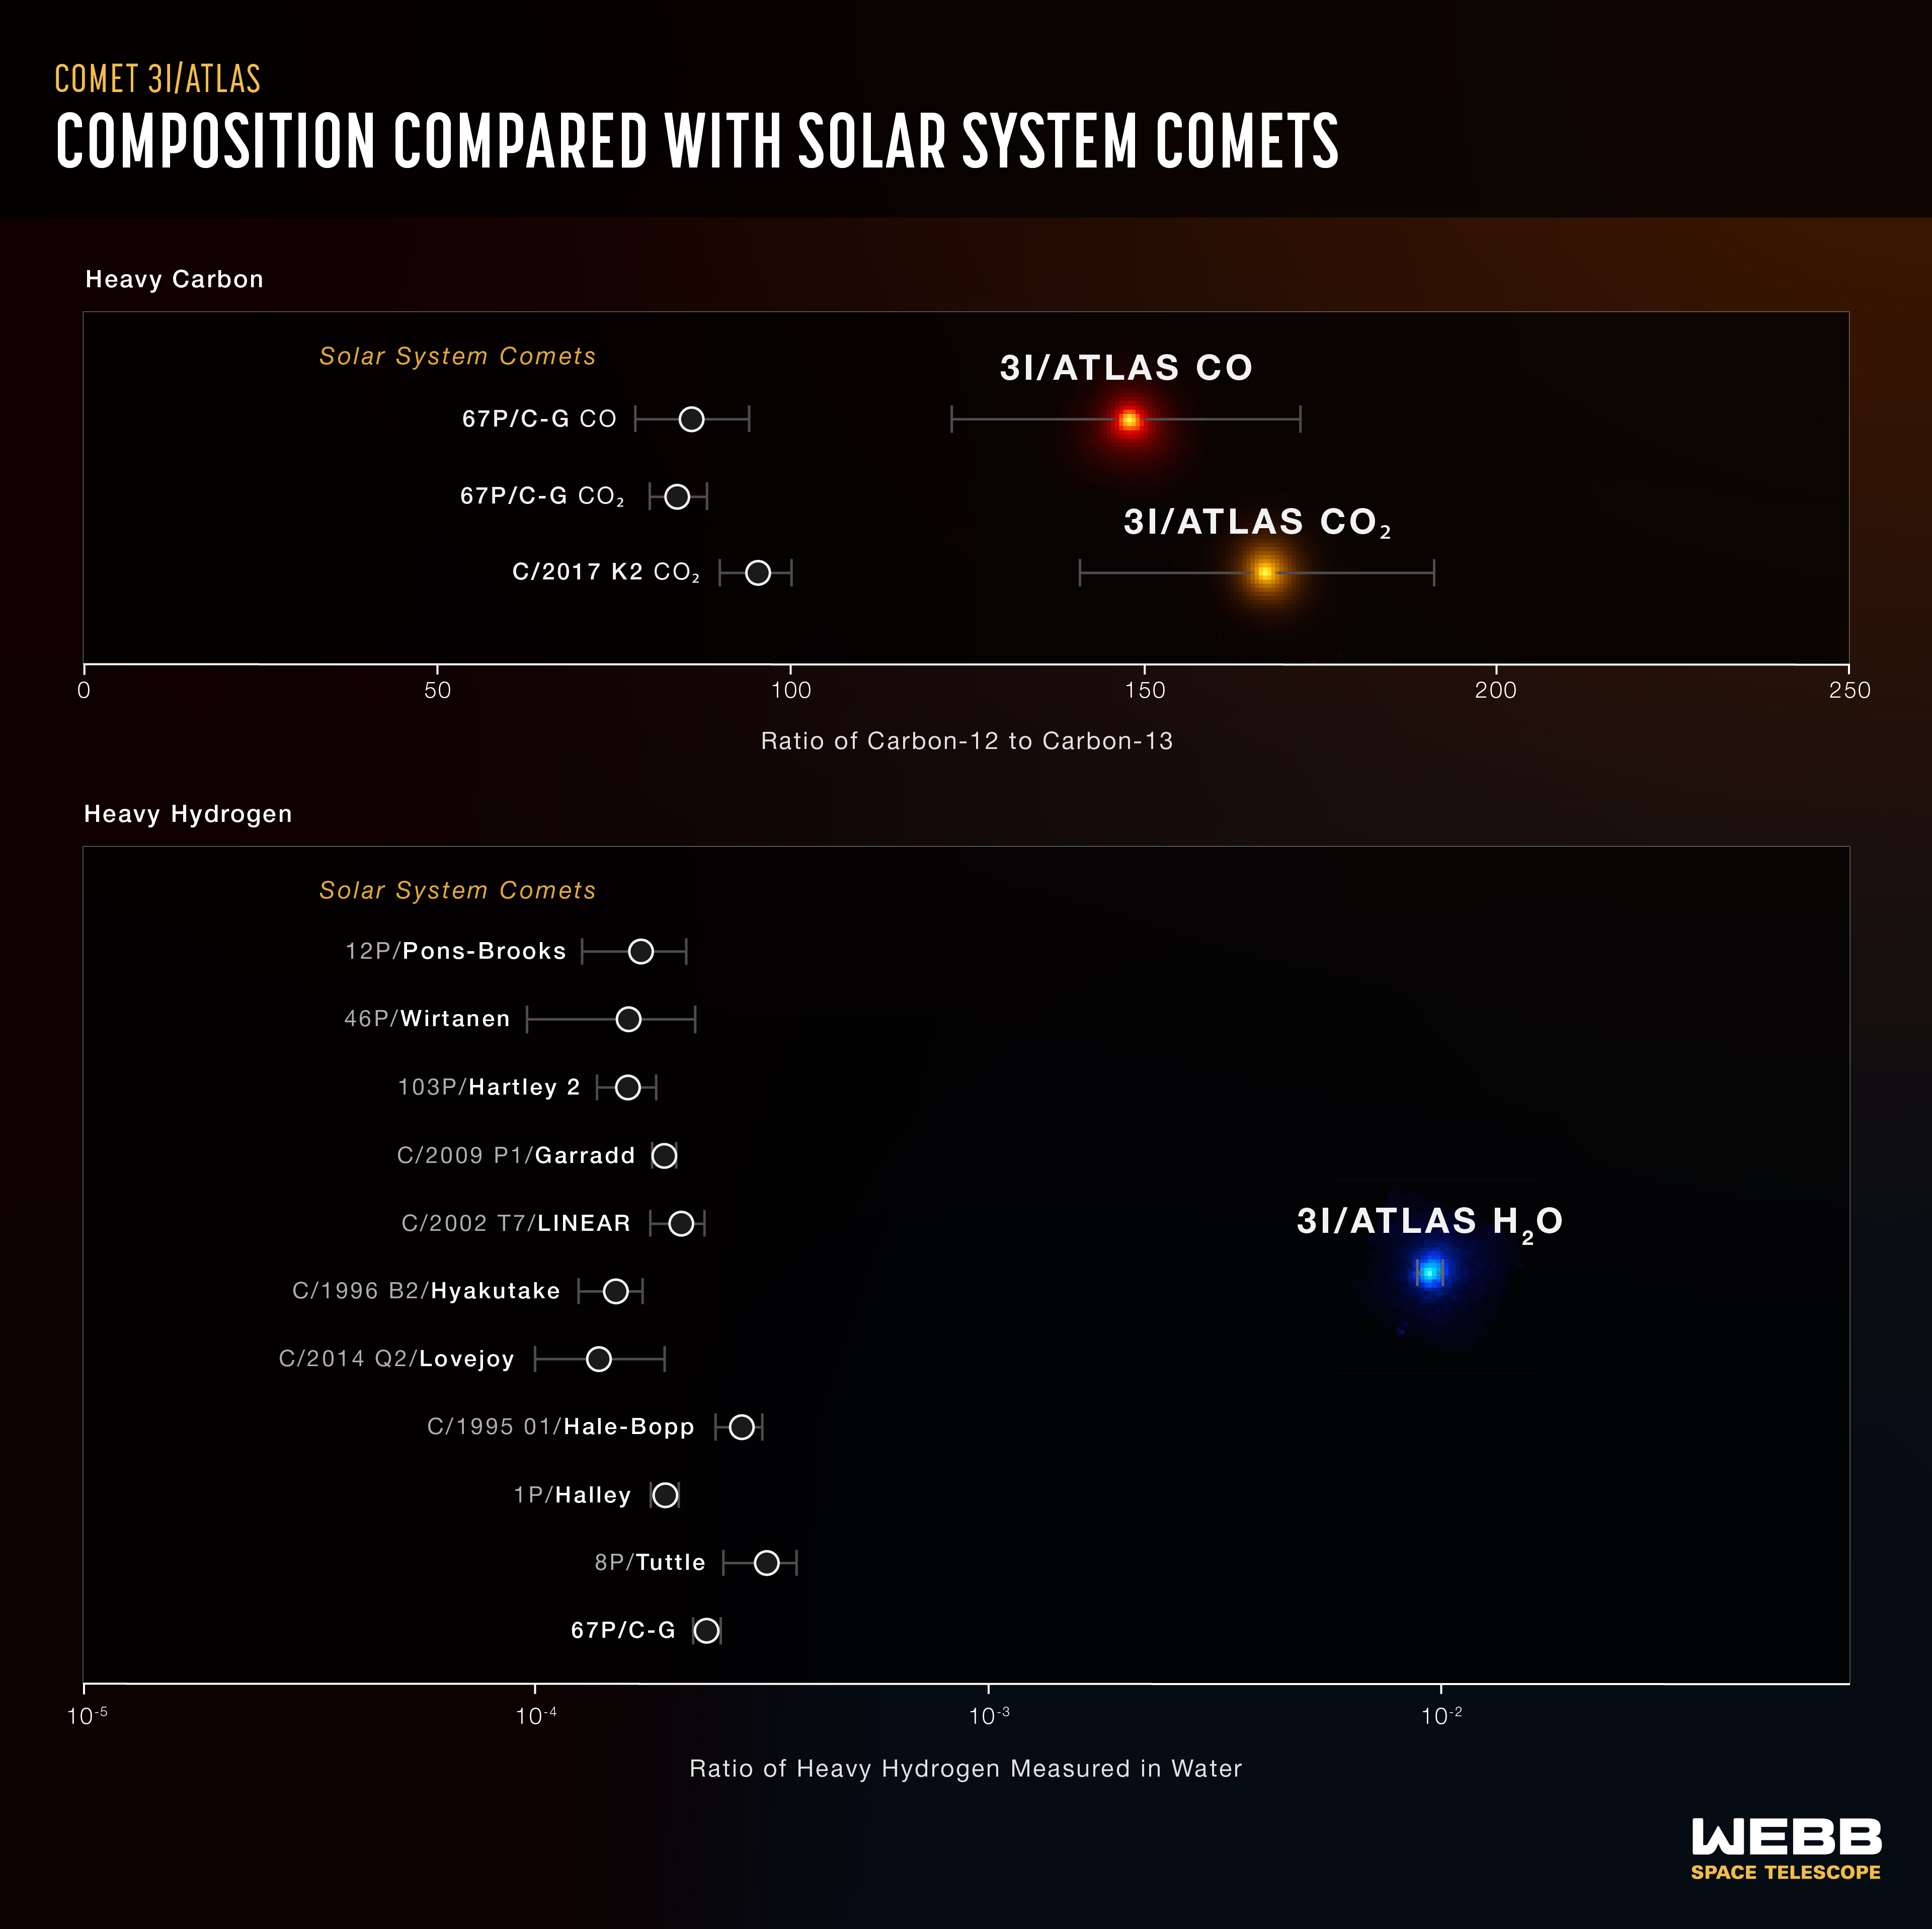

3I/ATLAS compared to Solar System comets

Measurements of specific element varieties by Webb’s NIRSpec (Near-Infrared Spectrograph) instrument show how different the interstellar comet 3I/ATLAS is from comets originating in our own Solar System. Researchers used NIRSpec to measure carbon-13, which contains an extra neutron, relative to the more common carbon-12. They also measured the abundance of heavy hydrogen, which is a hydrogen atom with an added neutron.

Webb’s NIRSpec found a surprisingly large amount of heavy hydrogen, with a low abundance of carbon-13, indicating that 3I/ATLAS came from a place very different from our own Solar System. Researchers say early analysis of these results indicates that 3I/ATLAS was ejected from its origin system billions of years ago.

Credit: NASA, ESA, CSA, M. Cordiner, L. Hustak (STScI)